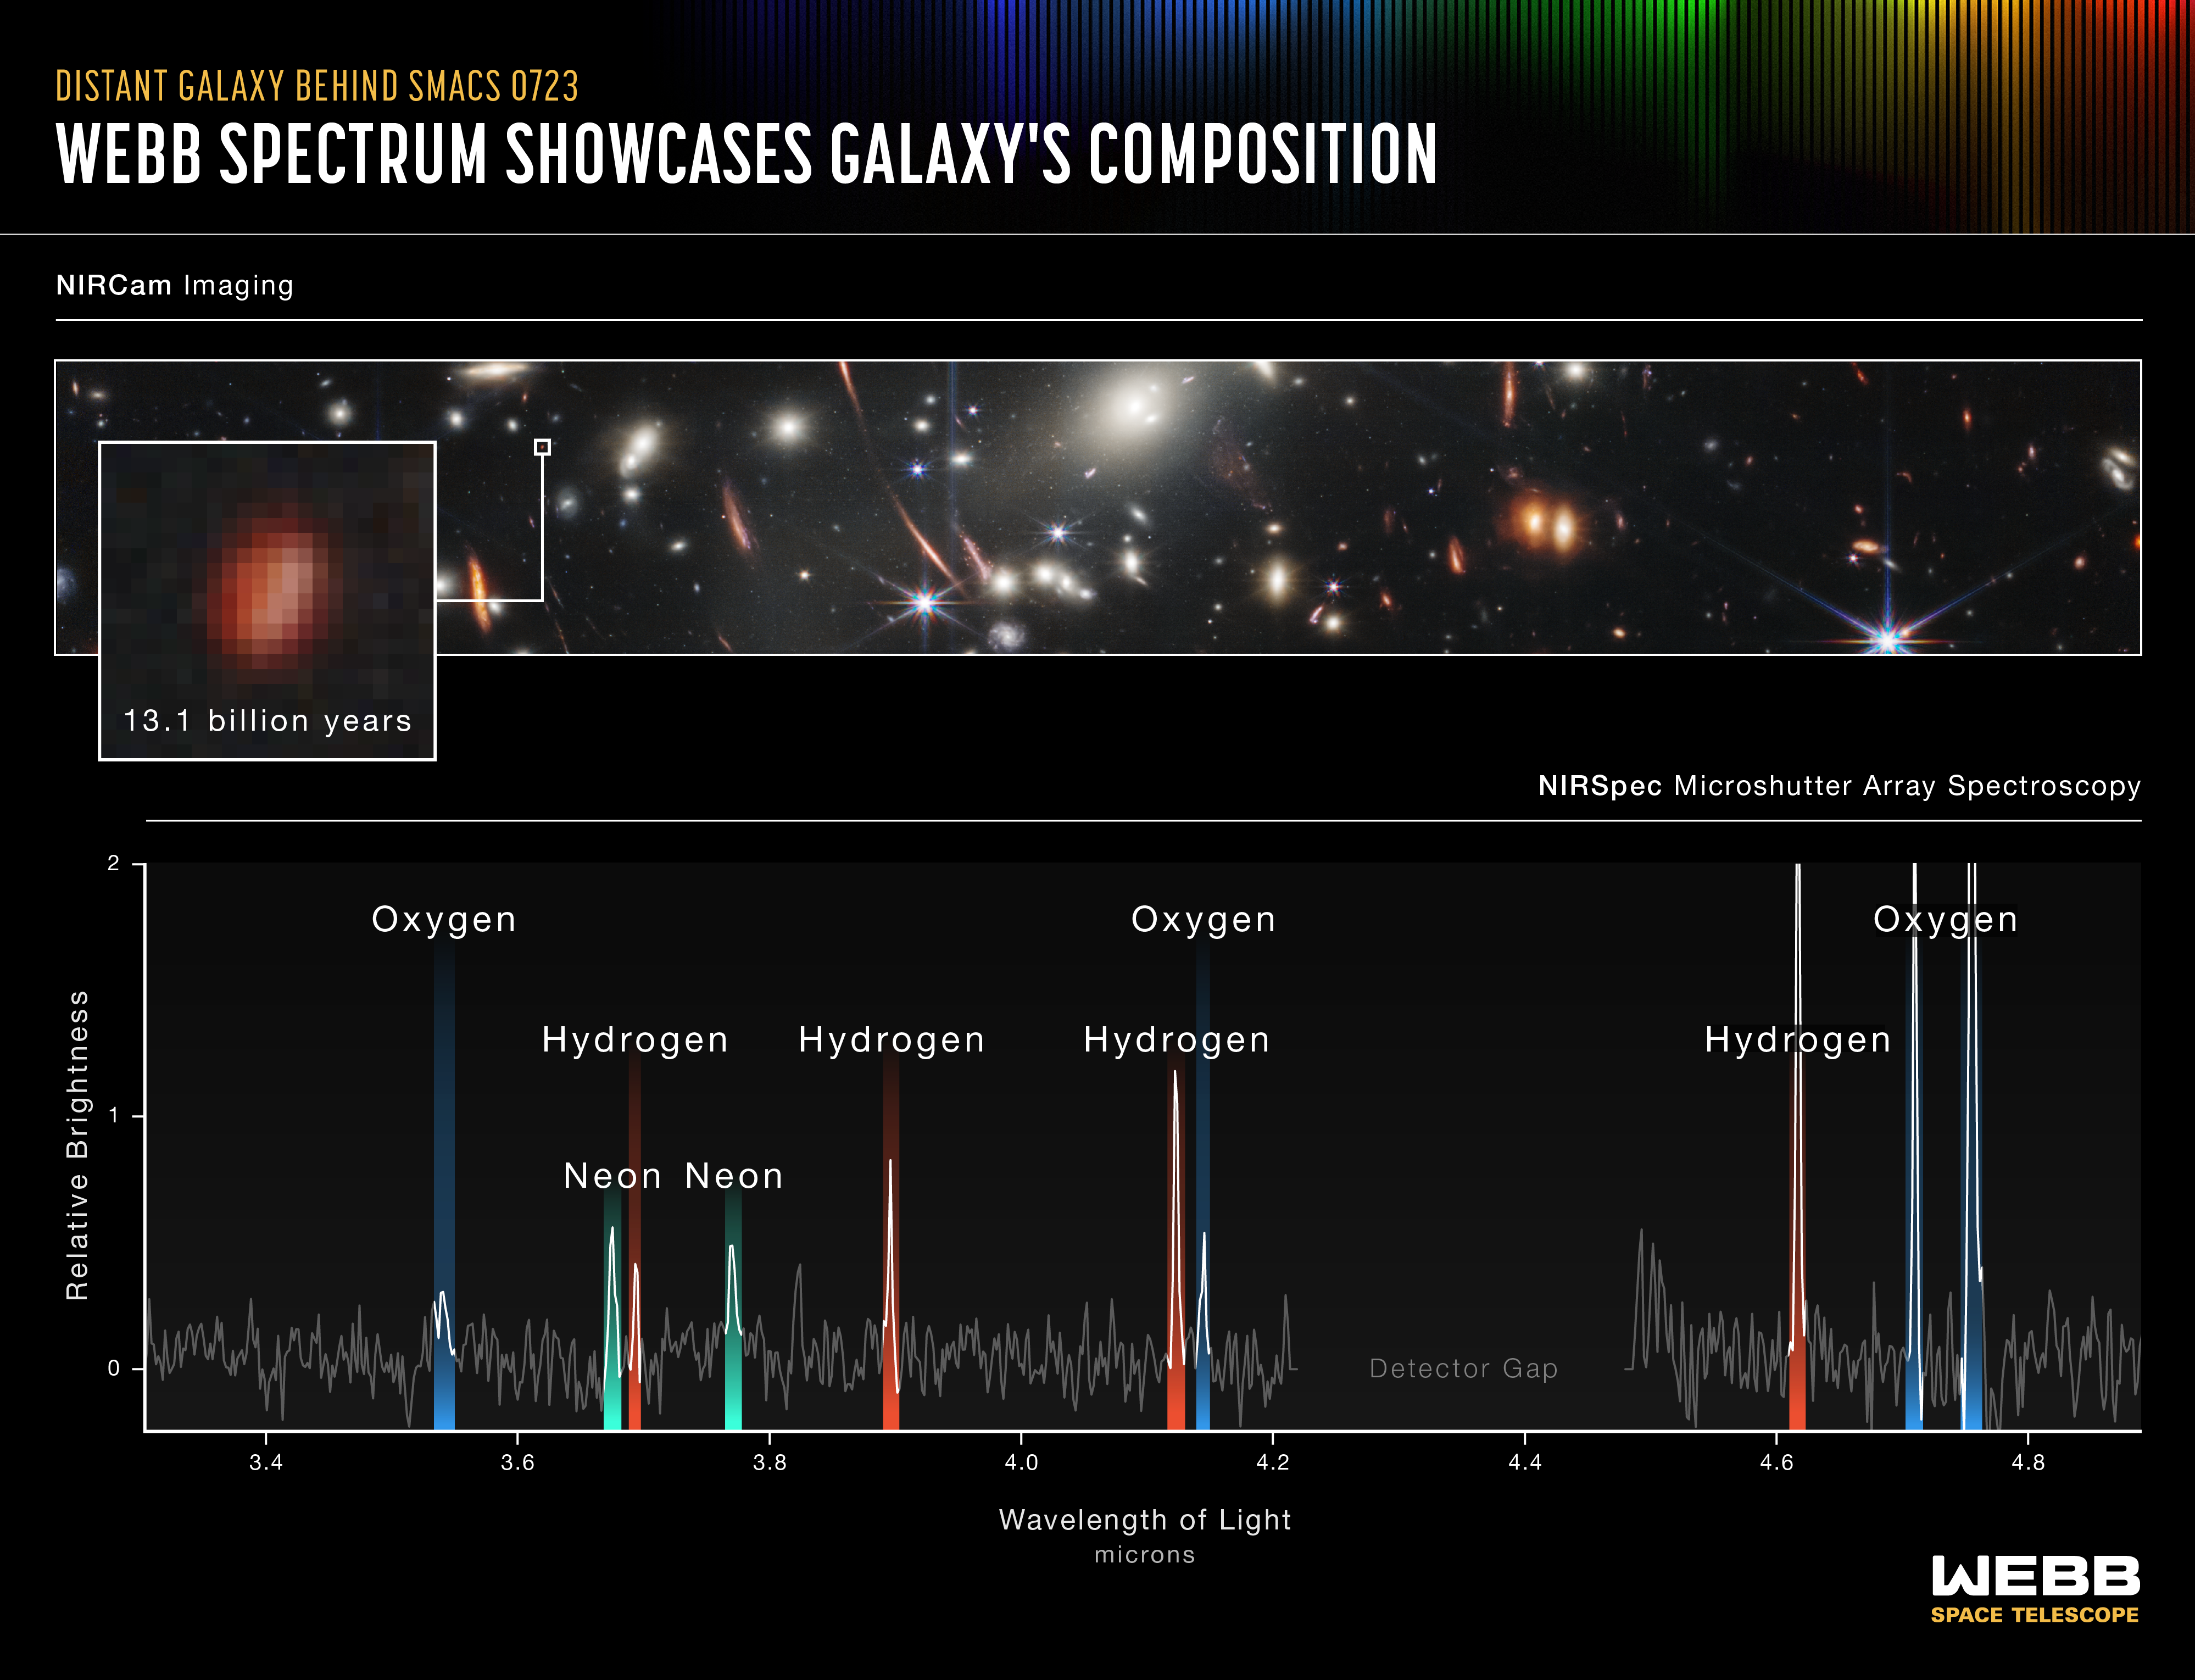

Webb Spectrum Showcases Galaxy’s Composition (NIRSpec Emission Spectrum)

This galaxy emitted its light 13.1 billion years ago.

It was captured by Webb’s microshutter array, part of its Near-Infrared Spectrograph (NIRSpec). This instrument is so sensitive that it can observe the light of individual galaxies that existed in the very early universe. This will prove transformational for research. Webb’s capabilities have allowed scientists to observe spectra of galaxies this far away for the first time.

When researchers stretch out the light of an individual galaxy into a spectrum, like the graph shown above, they can learn about the chemical composition, temperature, and density of the galaxy’s ionised gas. For example, this galaxy’s spectrum will reveal the properties of its gas, which will indicate how its stars are forming and how much dust it contains. These data are rich – and have never before been detected from this far away at this quality.

As astronomers begin analysing Webb’s data, we will learn an incredible amount about galaxies that existed all across cosmic time – and how they compare to the beautiful spiral and elliptical galaxies in the nearby universe.

For a full array of Webb’s first images and spectra, including downloadable files, please visit: https://esawebb.org/initiatives/webbs-first-images/

NIRSpec was built for the European Space Agency (ESA) by a consortium of European companies led by Airbus Defence and Space (ADS) with NASA’s Goddard Space Flight Center providing its detector and micro-shutter subsystems.

Credit: NASA, ESA, CSA, and STScI